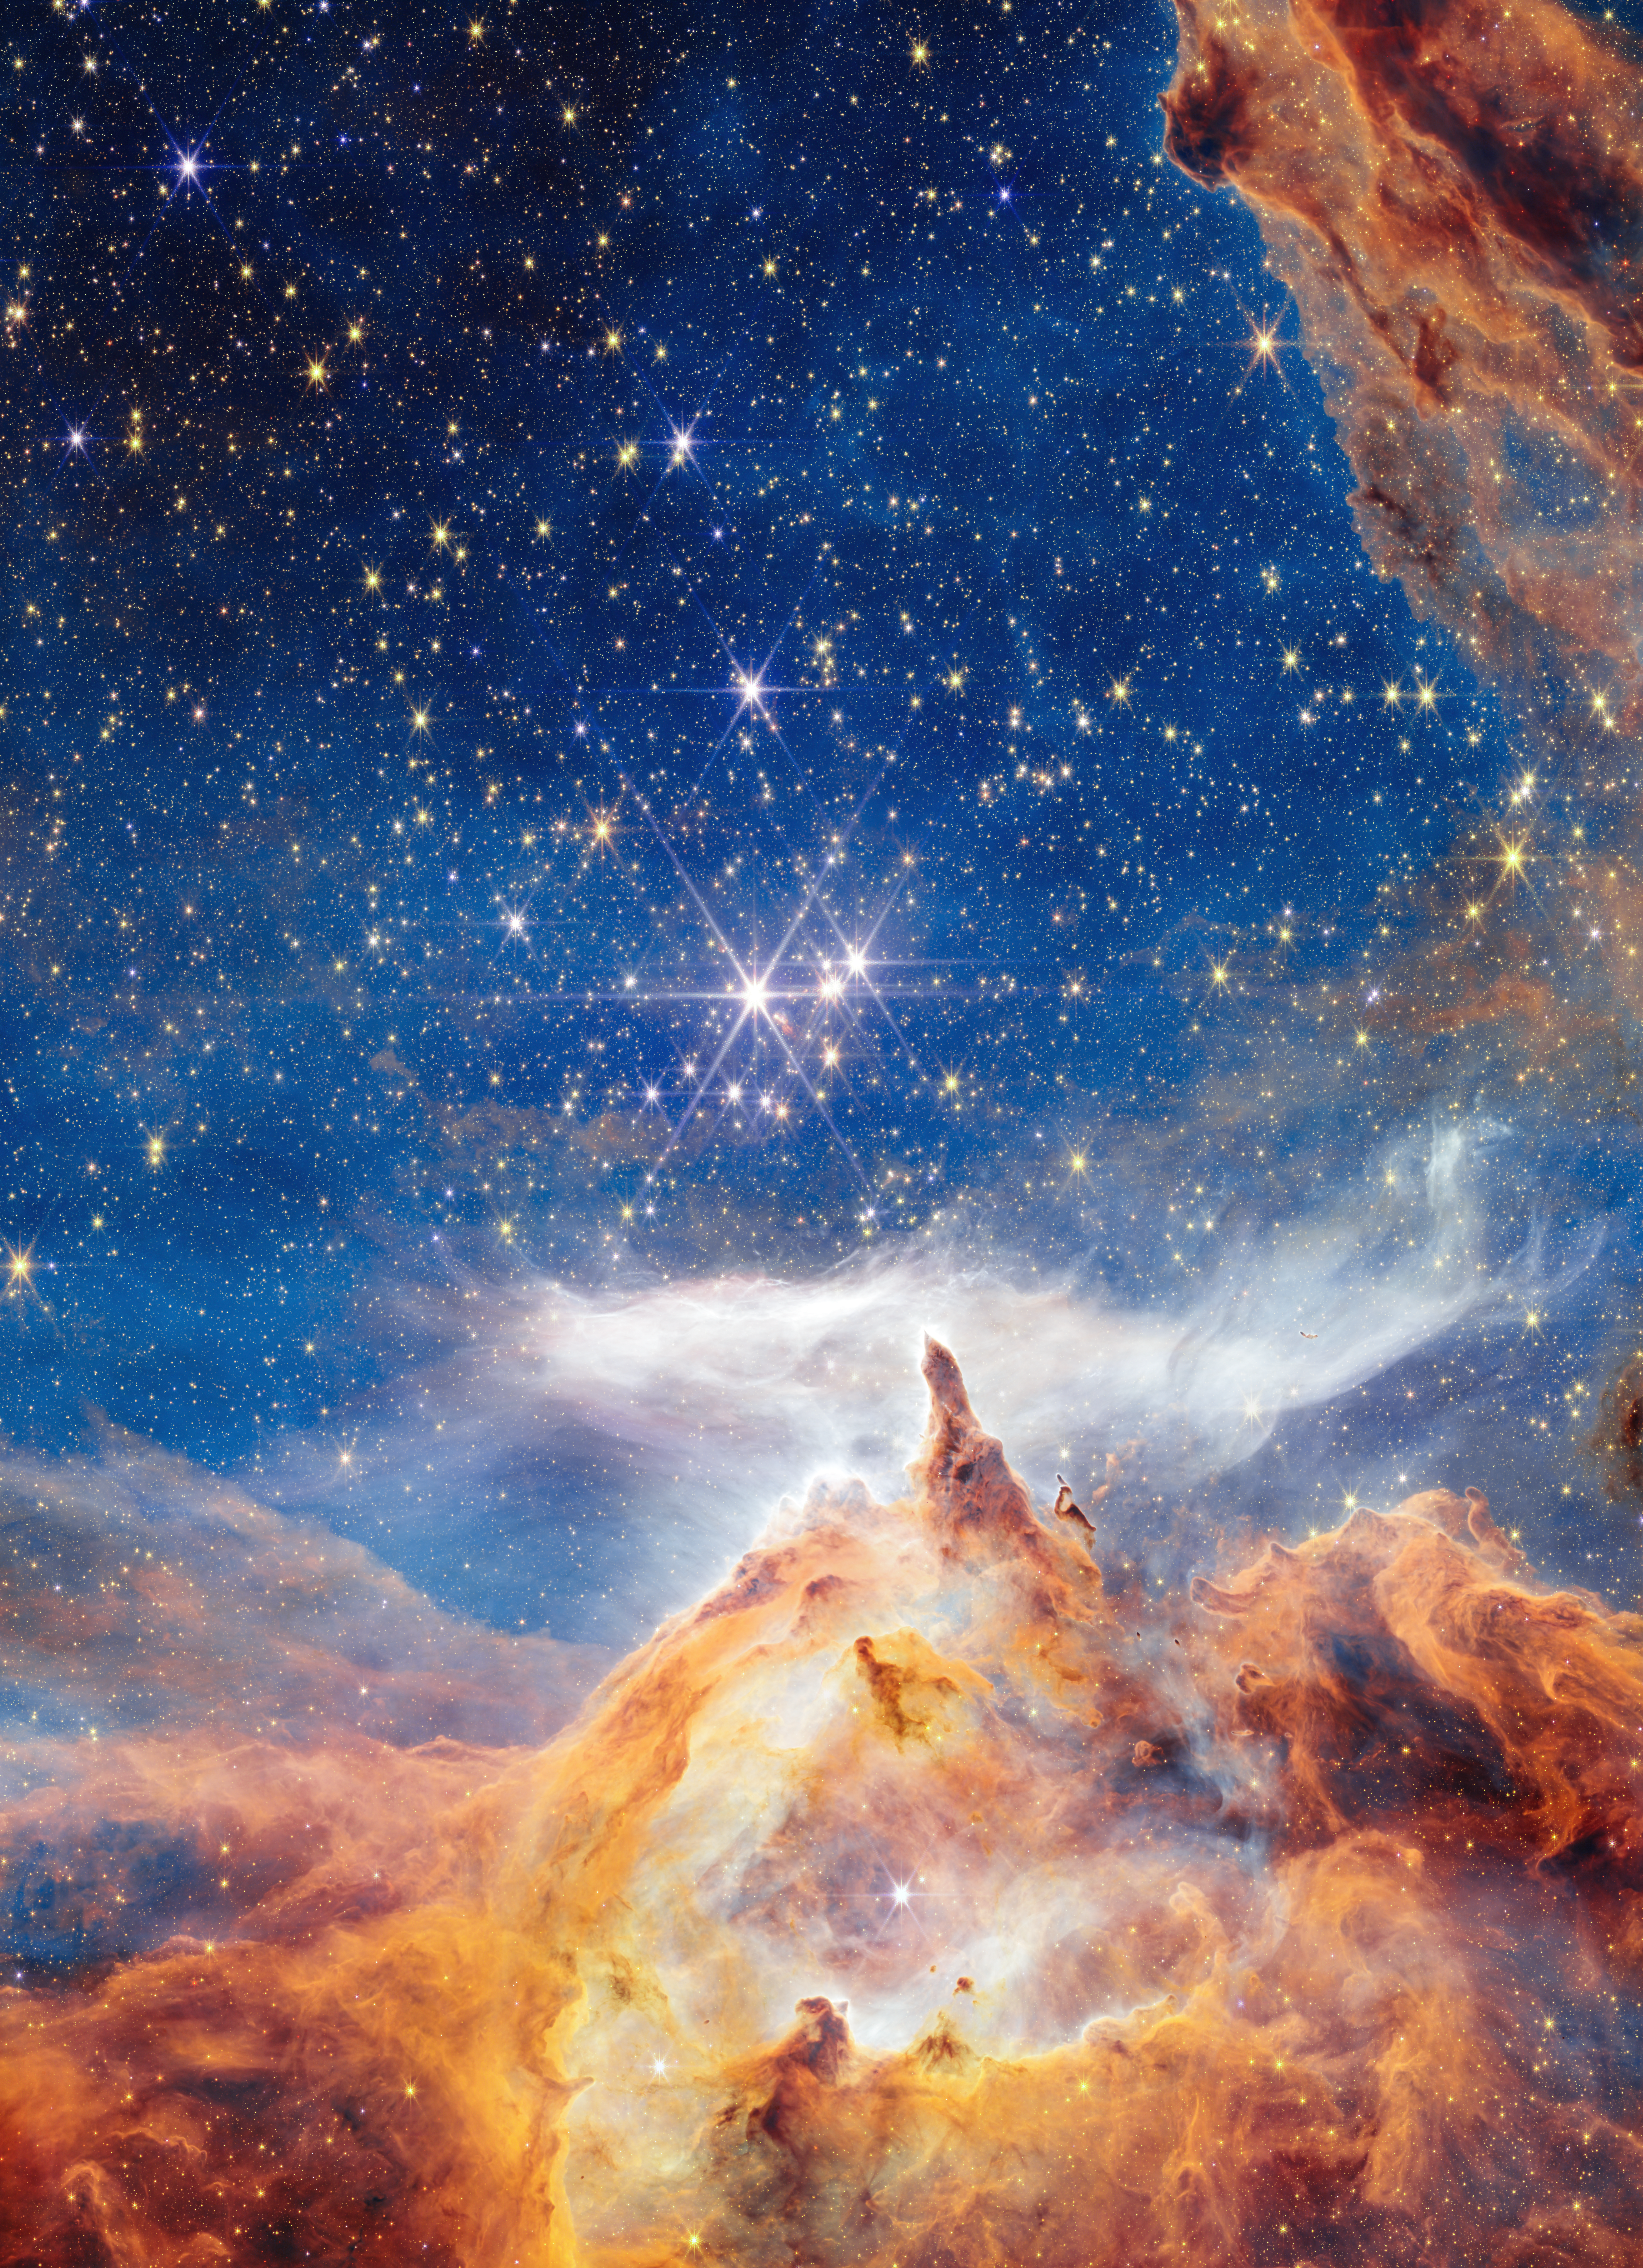

Pismis 24 (NIRCam image)

This sparkling scene of star birth was captured by the NASA/ESA/CSA James Webb Space Telescope. What appears to be a craggy, starlit mountaintop kissed by wispy clouds is actually a cosmic dust-scape being eaten away by the blistering winds and radiation of nearby, massive, infant stars.

Called Pismis 24, this young star cluster resides in the core of the nearby Lobster Nebula, approximately 5,500 light-years from Earth in the constellation Scorpius. Home to a vibrant stellar nursery and one of the closest sites of massive star birth, Pismis 24 provides rare insight into large and massive stars. This region is one of the best places to explore the properties of hot young stars and how they evolve.

Credit: NASA, ESA, CSA, and STScI, A. Pagan (STScI)